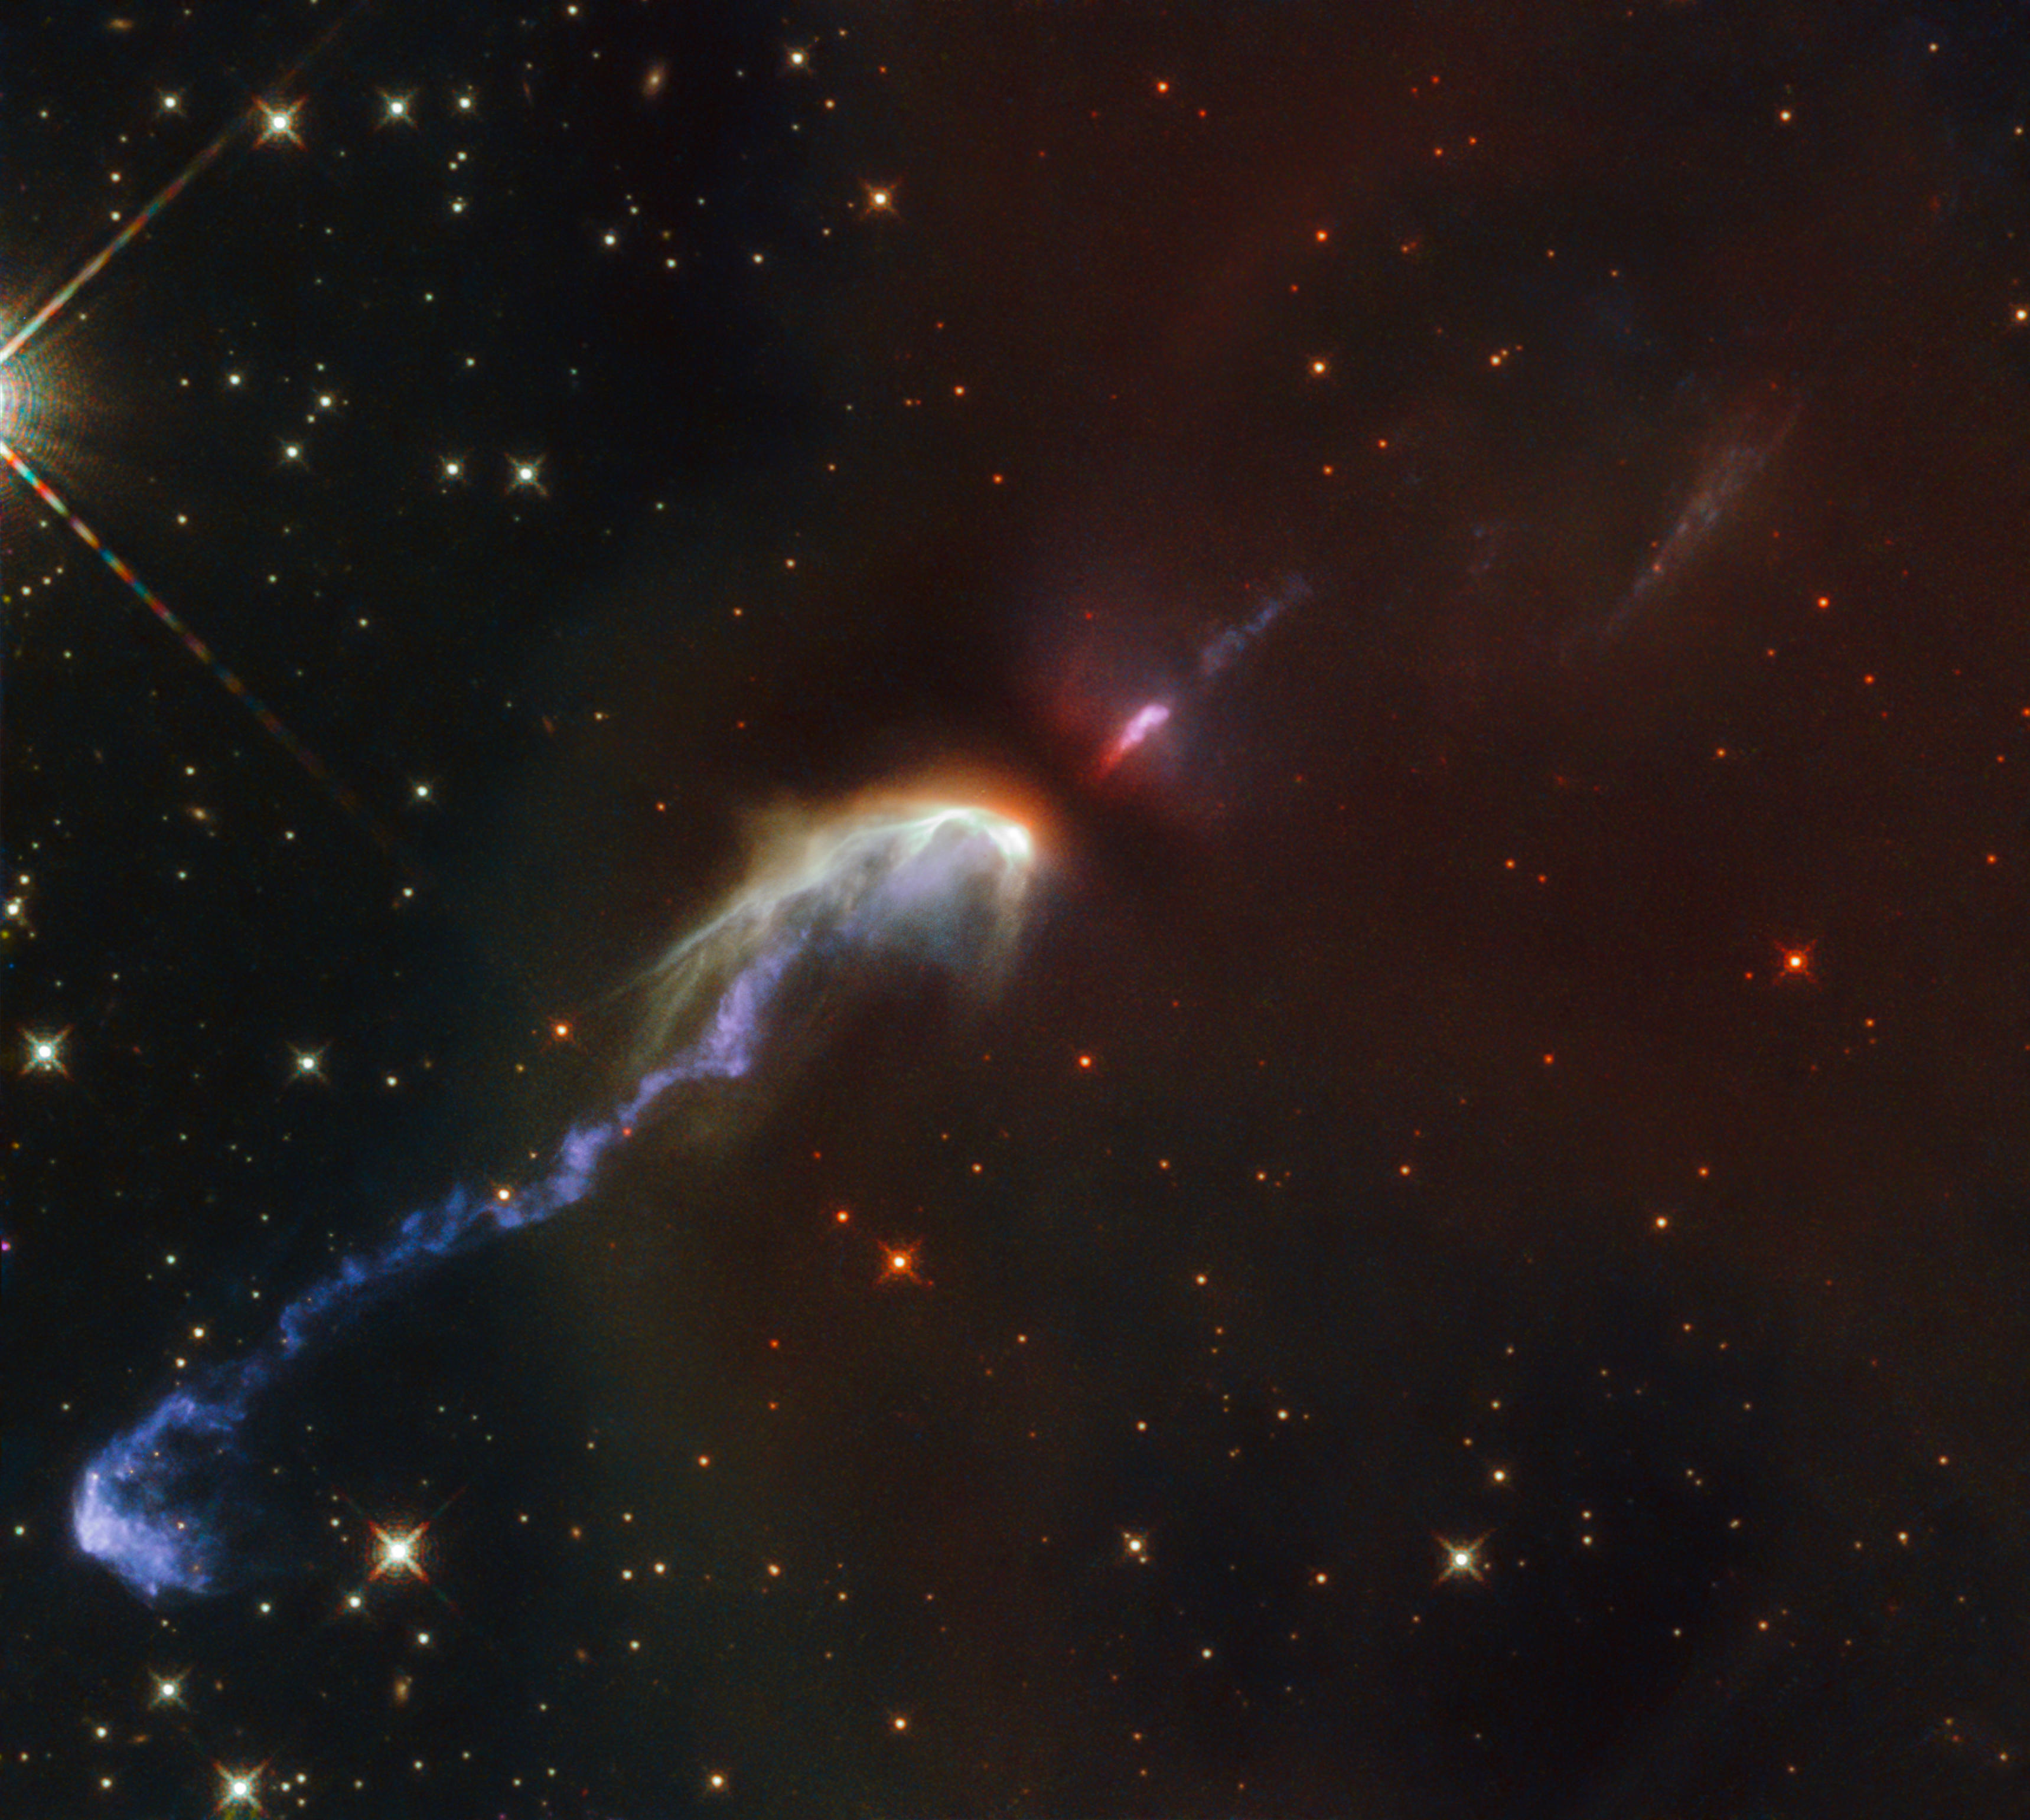

Tantrums of a Baby Star

Herbig-Haro objects are some of the rarer sights in the night sky, taking the form of thin spindly jets of matter floating amongst the surrounding gas and stars. The two Herbig-Haro objects catalogued as HH46 and HH47, seen in this image taken with the NASA/ESA Hubble Space Telescope, were spotted in the constellation of Vela (The Sails), at a distance of over 1400 light-years from Earth. Prior to its discovery in 1977 by the American astronomer R. D. Schwartz, the exact mechanism by which these multi-coloured objects formed was unknown.

Before 1997 it was theorised by Schwartz and others that the objects could be a type of reflection nebula, or a type of shock wave formed from the gas emitted from a star interacting with the surrounding matter. The mystery was finally solved when a protostar, unseen in this image, was discovered at the centre of the long jets of matter. The outflows of matter, some 10 light-years across, were ejected from the newly born star and violently propelled outwards at speeds of over 150 kilometres per second. Upon reaching the surrounding gas, the collision created the bright shock waves seen here.

Credit: ESA/Hubble & NASA, B. Nisini